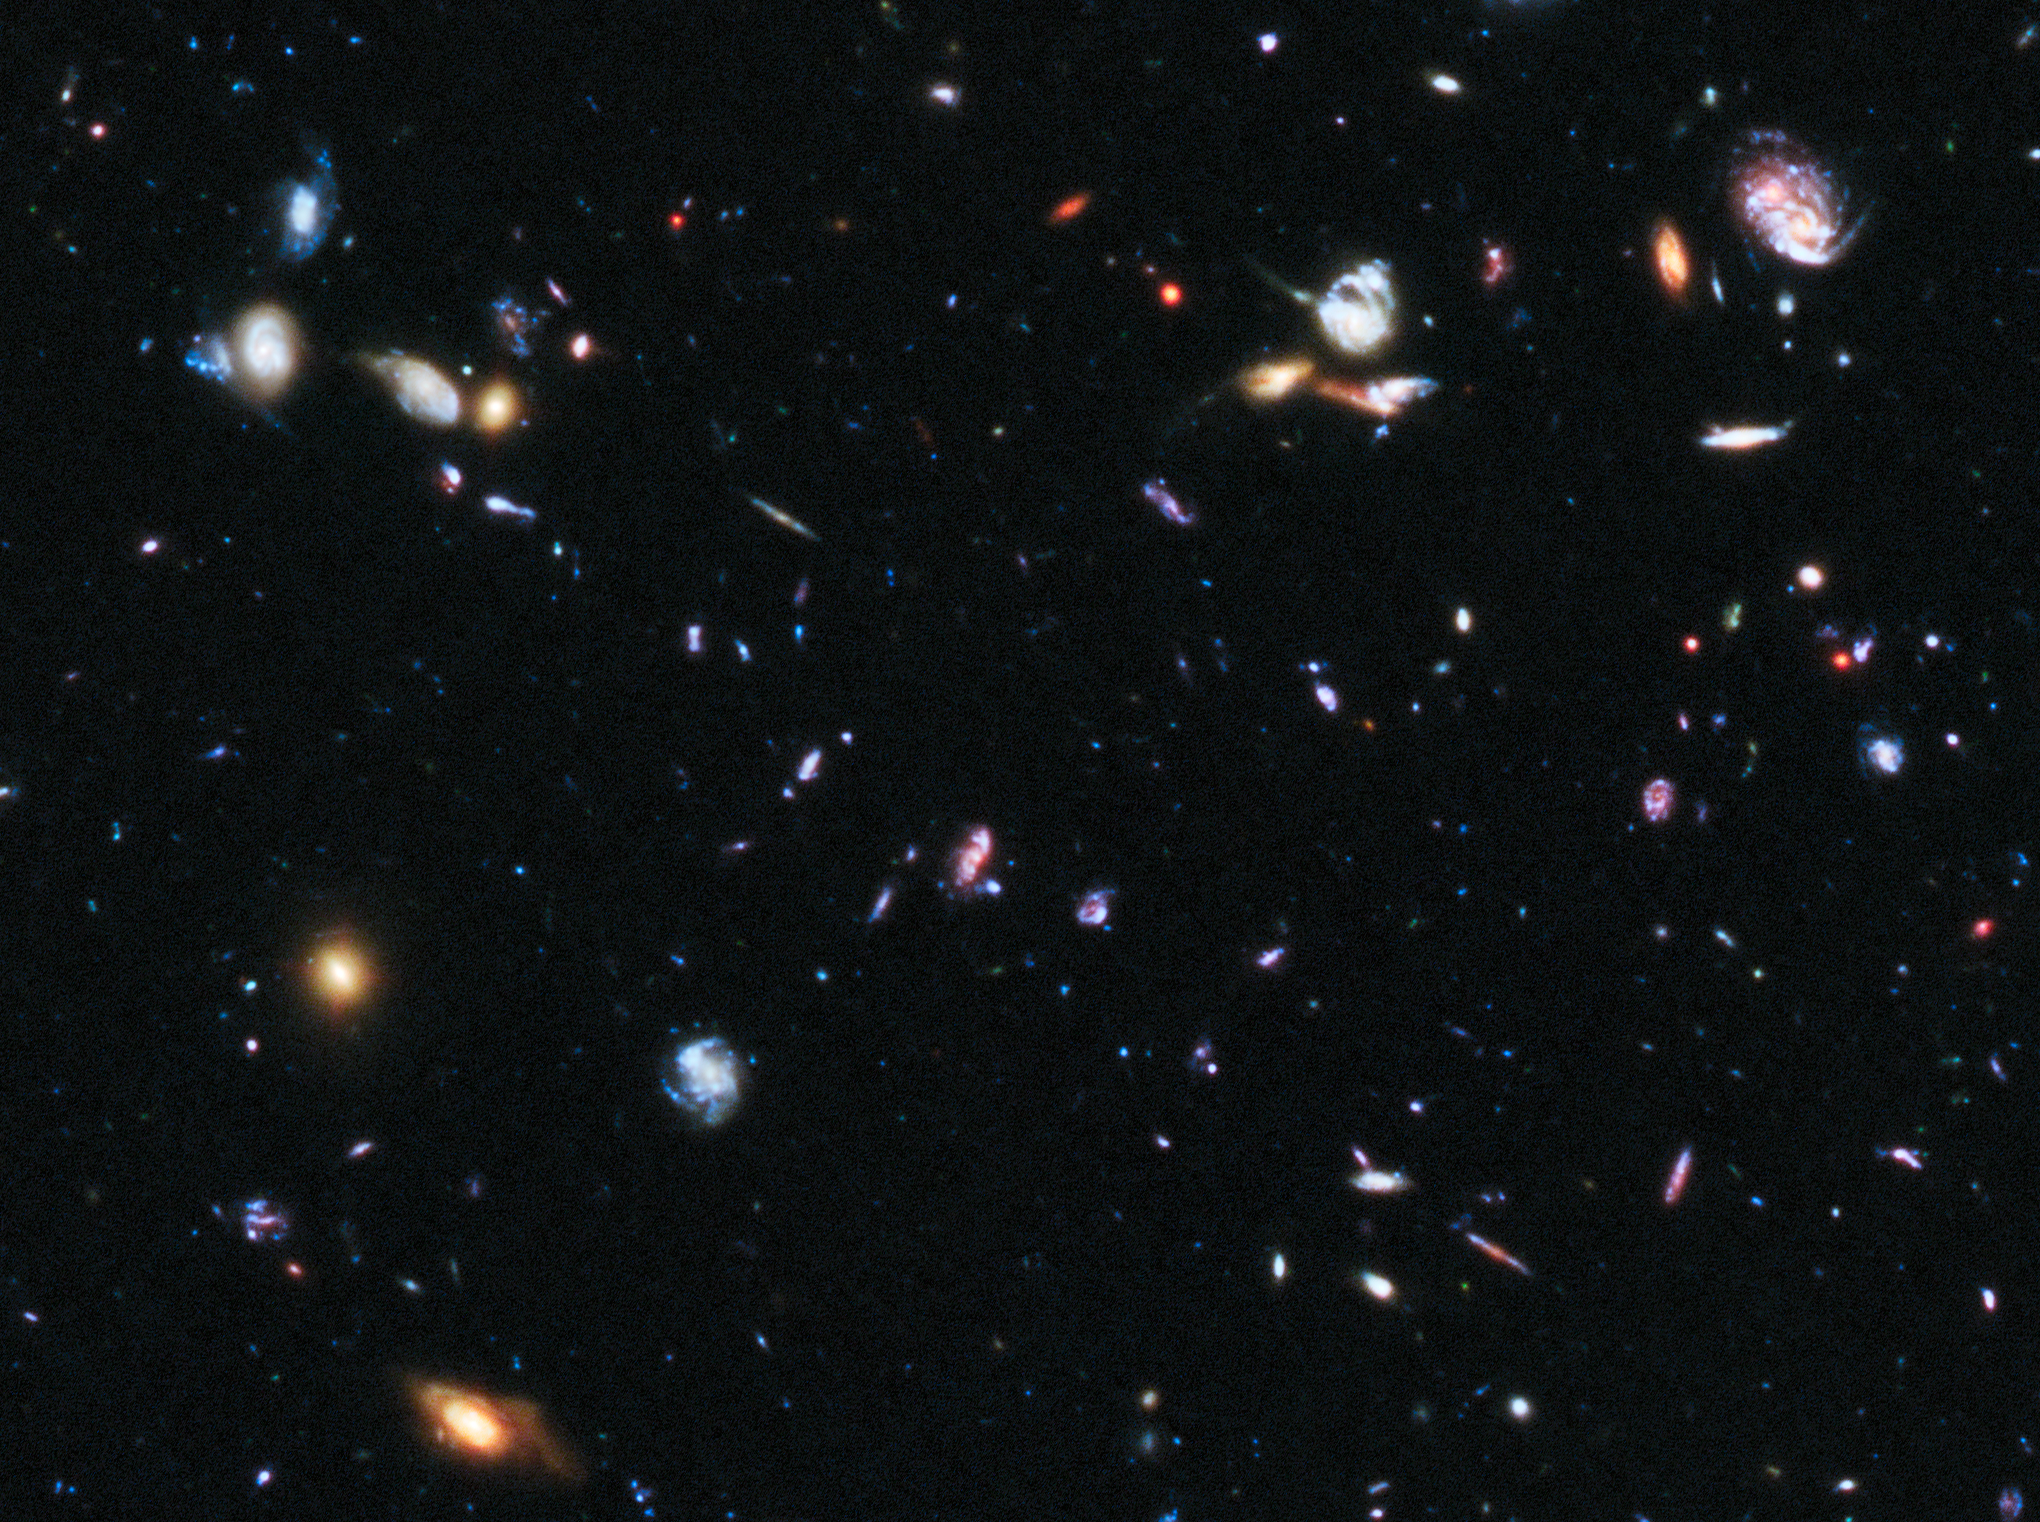

HUDF image including location of SN Primo

This image shows part of the Hubble Ultra Deep Field, a region where astronomers confirmed the most distant Type Ia supernova yet observed.

Credit: NASA, ESA, A. Riess (STScI and JHU), and S. Rodney (JHU)